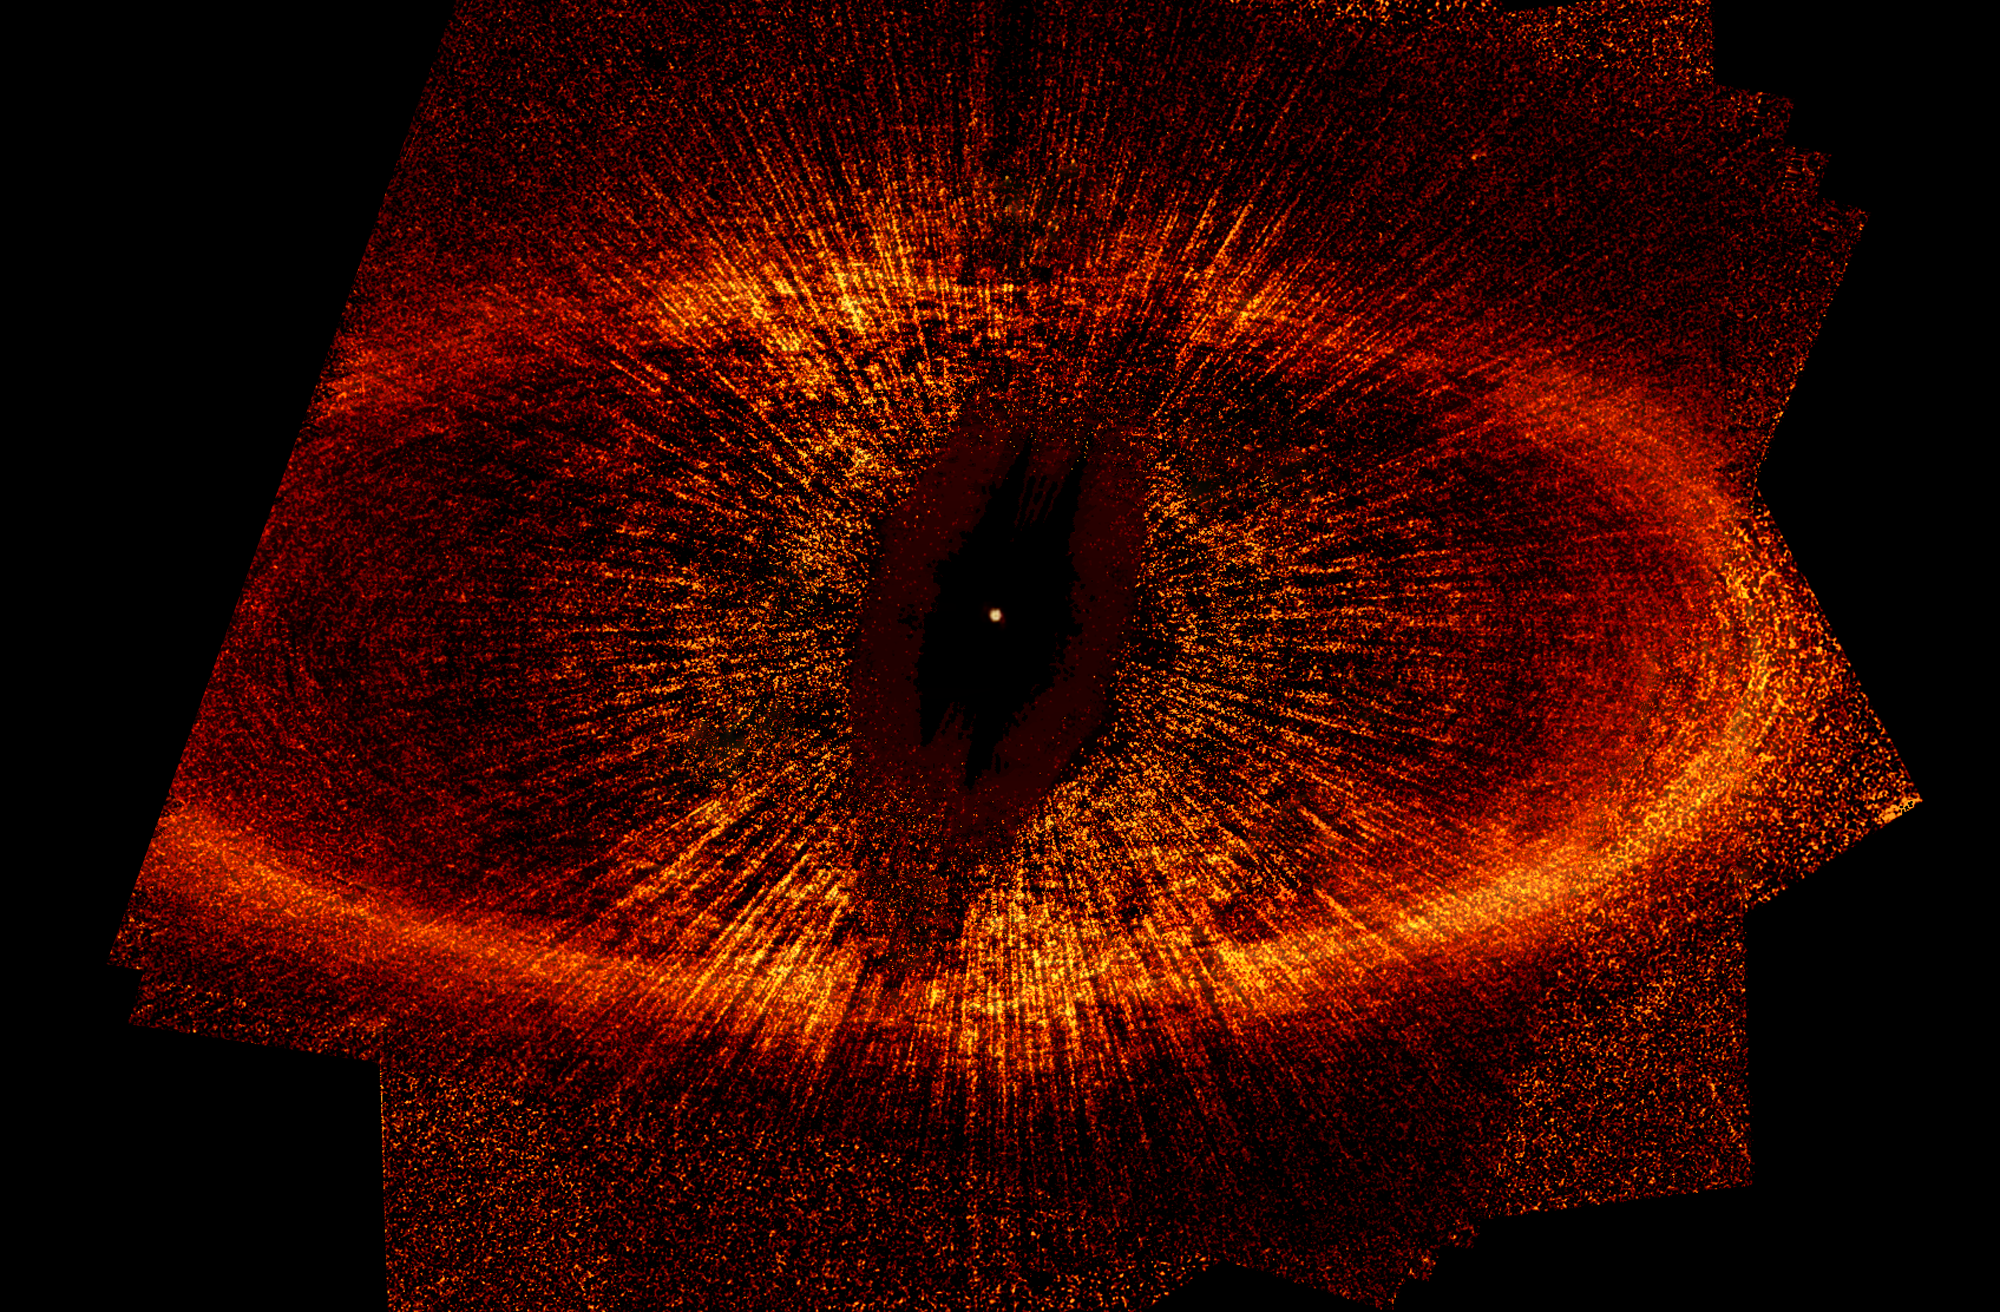

Debris Ring Around a Star: Unannotated

The top view, taken by NASA/ESA Hubble Space Telescope, is the first visible-light image of a dust ring around the nearby, bright young star Fomalhaut (HD 216956). The image offers the strongest evidence yet that an unruly planet may be tugging on the dusty belt. Part of the ring [at left] is outside the telescope's view. The ring is tilted obliquely to our line of sight.

The center of the ring is about 1.4 billion miles (15 astronomical units) away from the star. The dot near the ring's center marks the star's location. Astronomers believe that an unseen planet moving in an elliptical orbit is reshaping the ring.

Credit: NASA, ESA, P. Kalas and J. Graham (University of California, Berkeley), and M. Clampin (NASA's Goddard Space Flight Center)